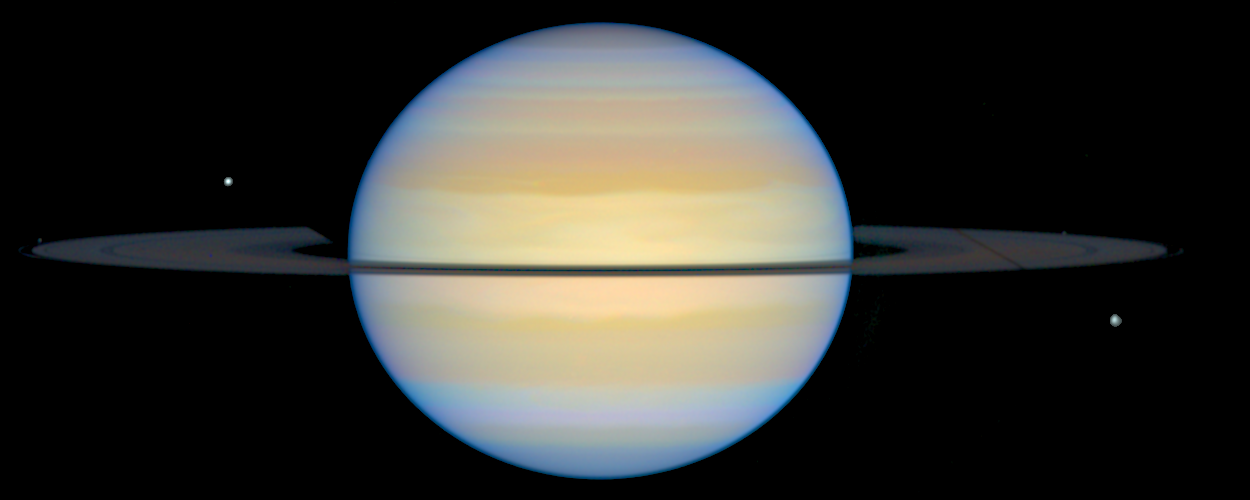

Edge-On View of Saturn's Rings

This photograph shows Saturn with its rings slightly tilted. The moon called Dione, on the lower right, is casting a long, thin shadow across the whole ring system due to the setting Sun on the ring plane. The moon on the upper left of Saturn is Tethys.

Credit: Erich Karkoschka (University of Arizona Lunar & Planetary Lab)and NASA/ESA